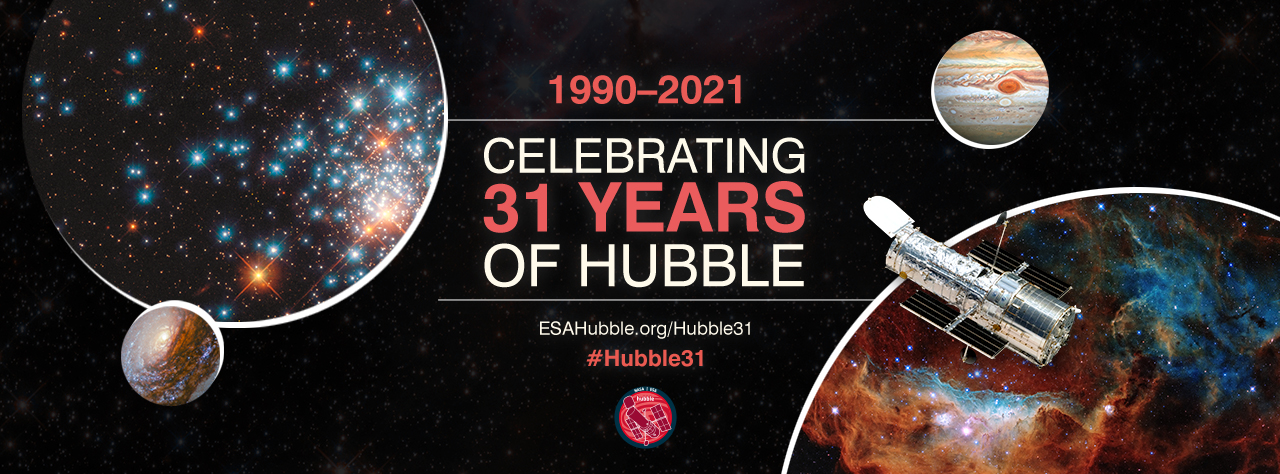

ESA/Hubble Celebrates Telescope’s 31st Anniversary

In April 2021, the NASA/ESA Hubble Space Telescope will celebrate 31 years since its launch.

Each year, ESA/Hubble develops a series of anniversary engagement initiatives to involve the public in the celebrations of Hubble’s impact in engineering, science and culture. Project updates pertaining to Hubble’s 31st anniversary around April and May 2021 are posted here.

Credit: ESA/Hubble